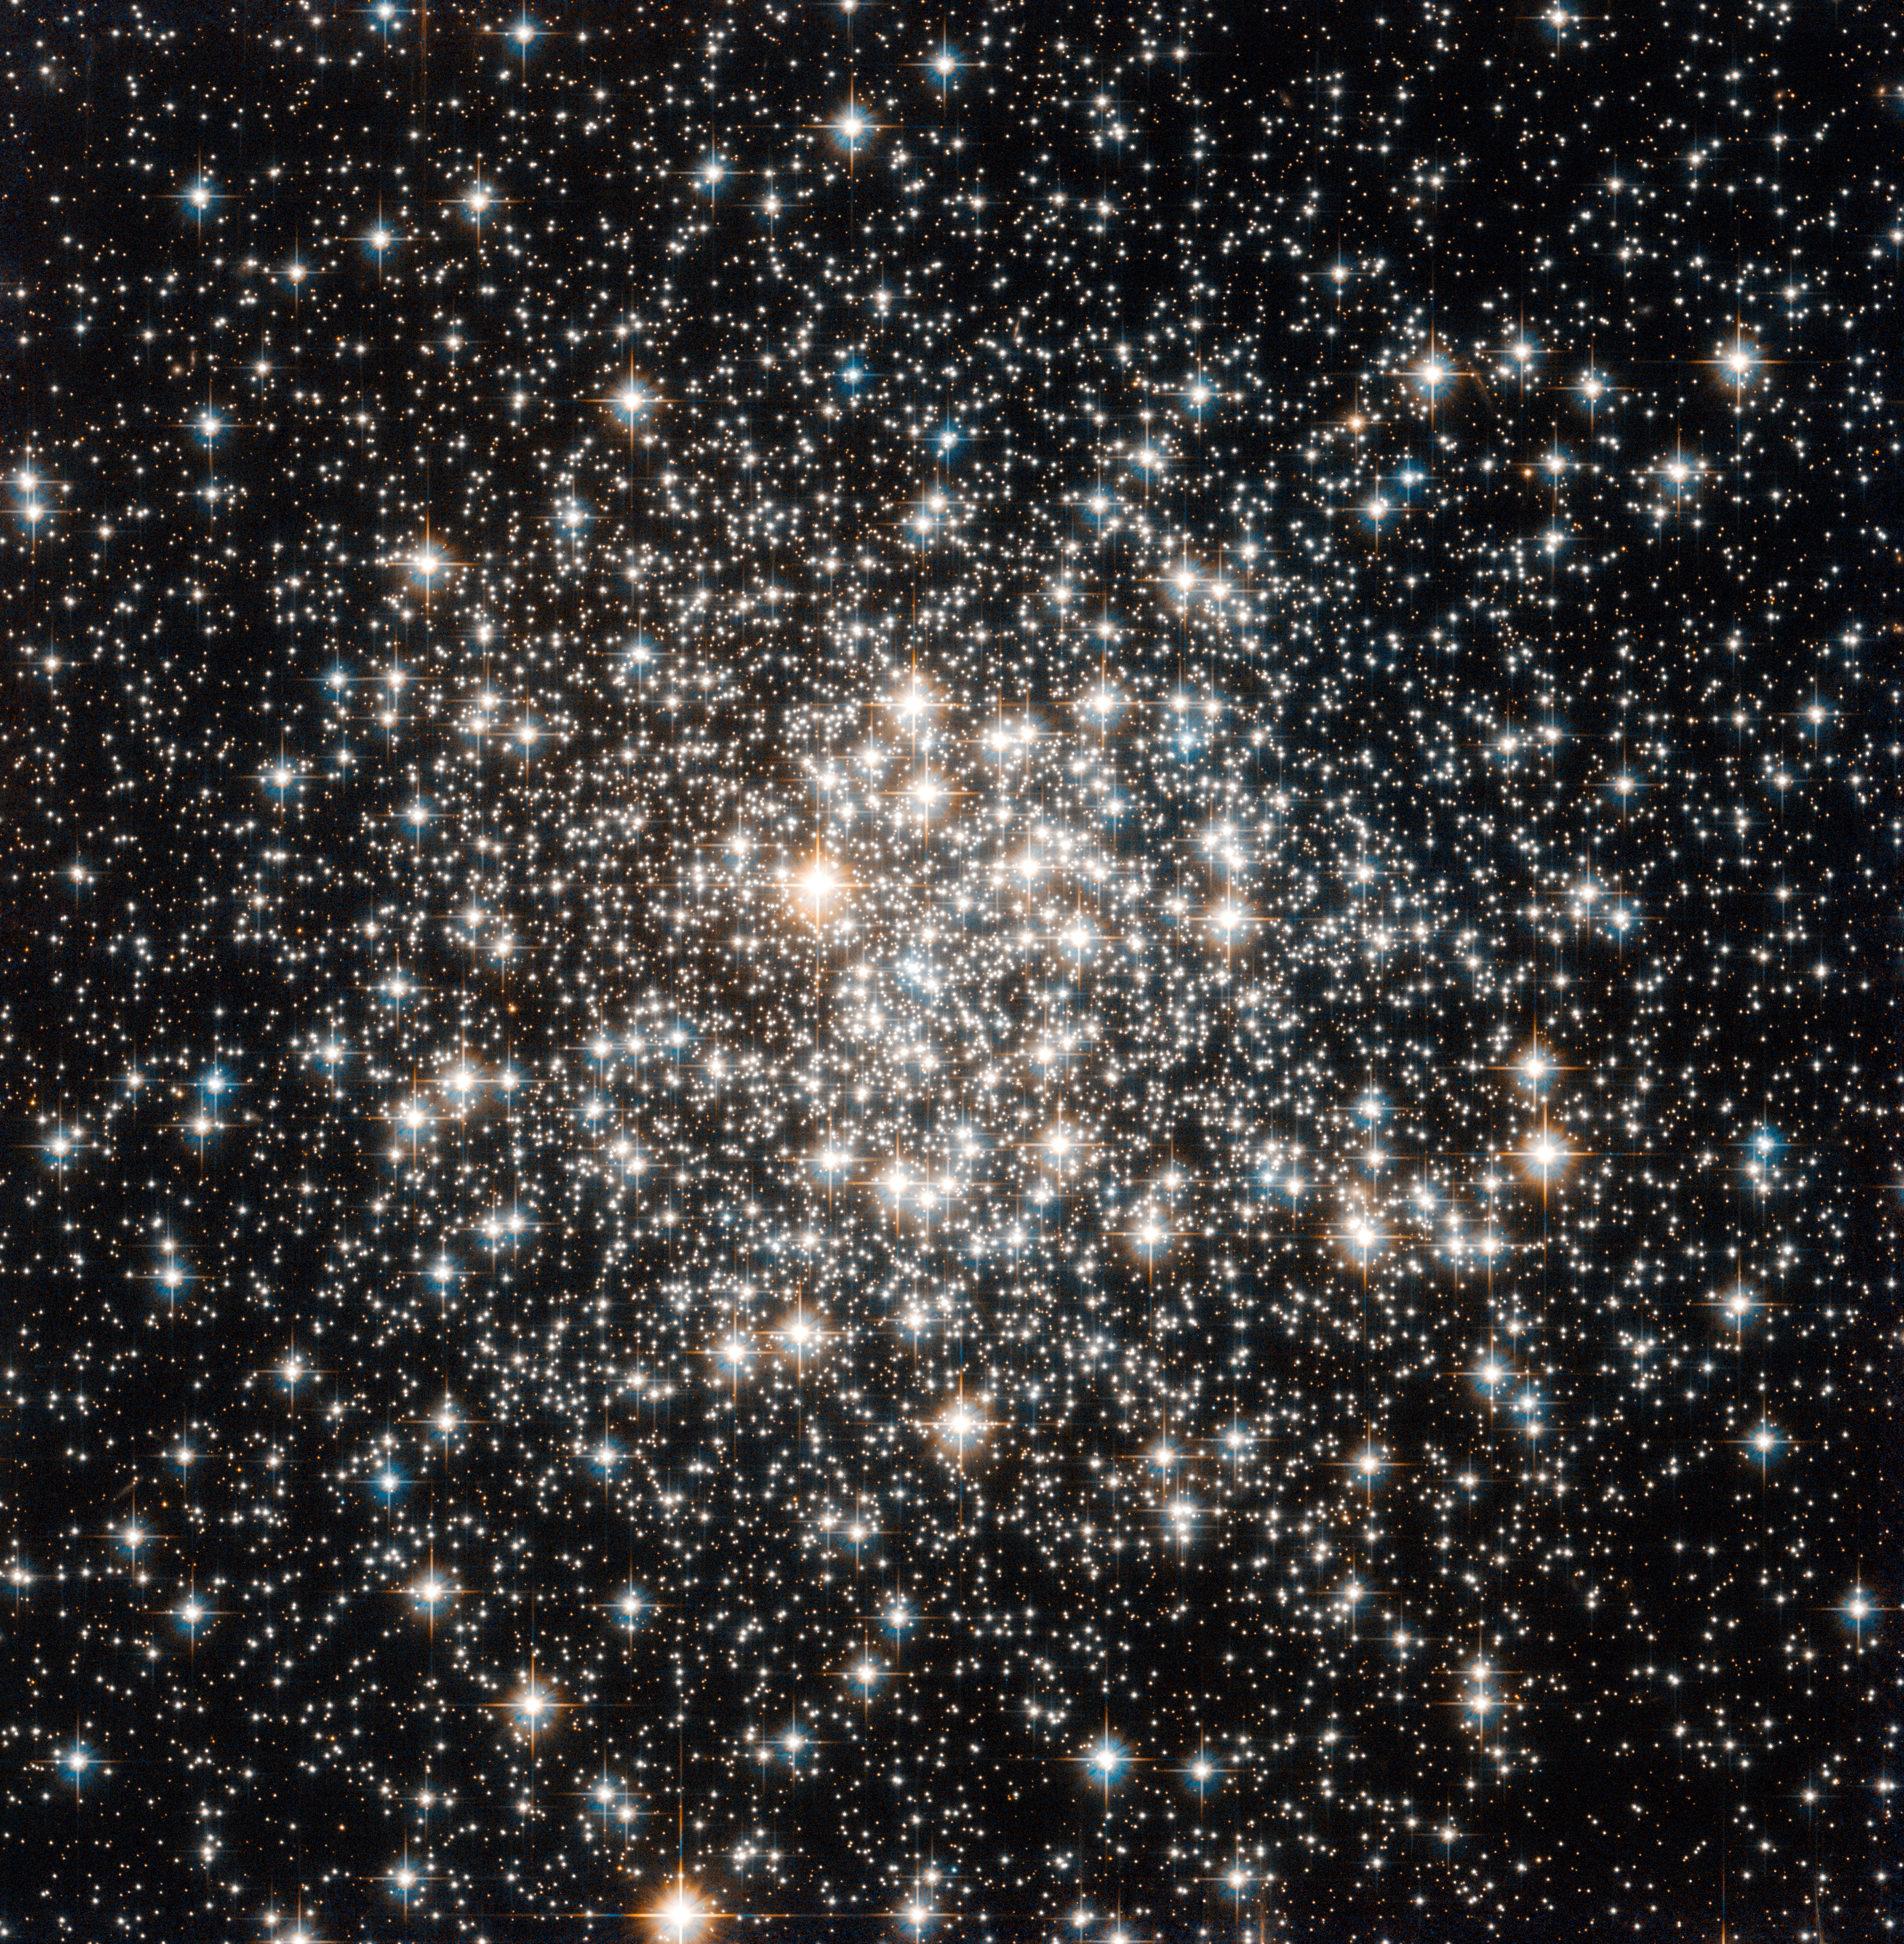

An audience of stellar flashbulbs

The NASA/ESA Hubble Space Telescope has captured a crowd of stars that looks rather like a stadium darkened before a show, lit only by the flashbulbs of the audience’s cameras. Yet the many stars of this object, known as Messier 107, are not a fleeting phenomenon, at least by human reckoning of time — these ancient stars have gleamed for many billions of years.

Messier 107 is one of more than 150 globular star clusters found around the disc of the Milky Way galaxy. These spherical collections each contain hundreds of thousands of extremely old stars and are among the oldest objects in the Milky Way. The origin of globular clusters and their impact on galactic evolution remains somewhat unclear, so astronomers continue to study them through pictures such as this one obtained by Hubble.

As globular clusters go, Messier 107 is not particularly dense. Visually comparing its appearance to other globular clusters, such as Messier 53 or Messier 54 reveals that the stars within Messier 107 are not packed as tightly, thereby making its members more distinct like individual fans in a stadium's stands.

Messier 107 can be found in the constellation of Ophiuchus (The Serpent Bearer) and is located about 20 000 light-years from the Solar System.

French astronomer Pierre Méchain first noted the object in 1782, and British astronomer William Herschel documented it independently a year later. A Canadian astronomer, Helen Sawyer Hogg, added Messier 107 to Charles Messier's famous astronomical catalogue in 1947.

This picture was obtained with the Wide Field Camera of Hubble’s Advanced Camera for Surveys. The field of view is approximately 3.4 by 3.4 arcminutes.

Credit: ESA/Hubble & NASA